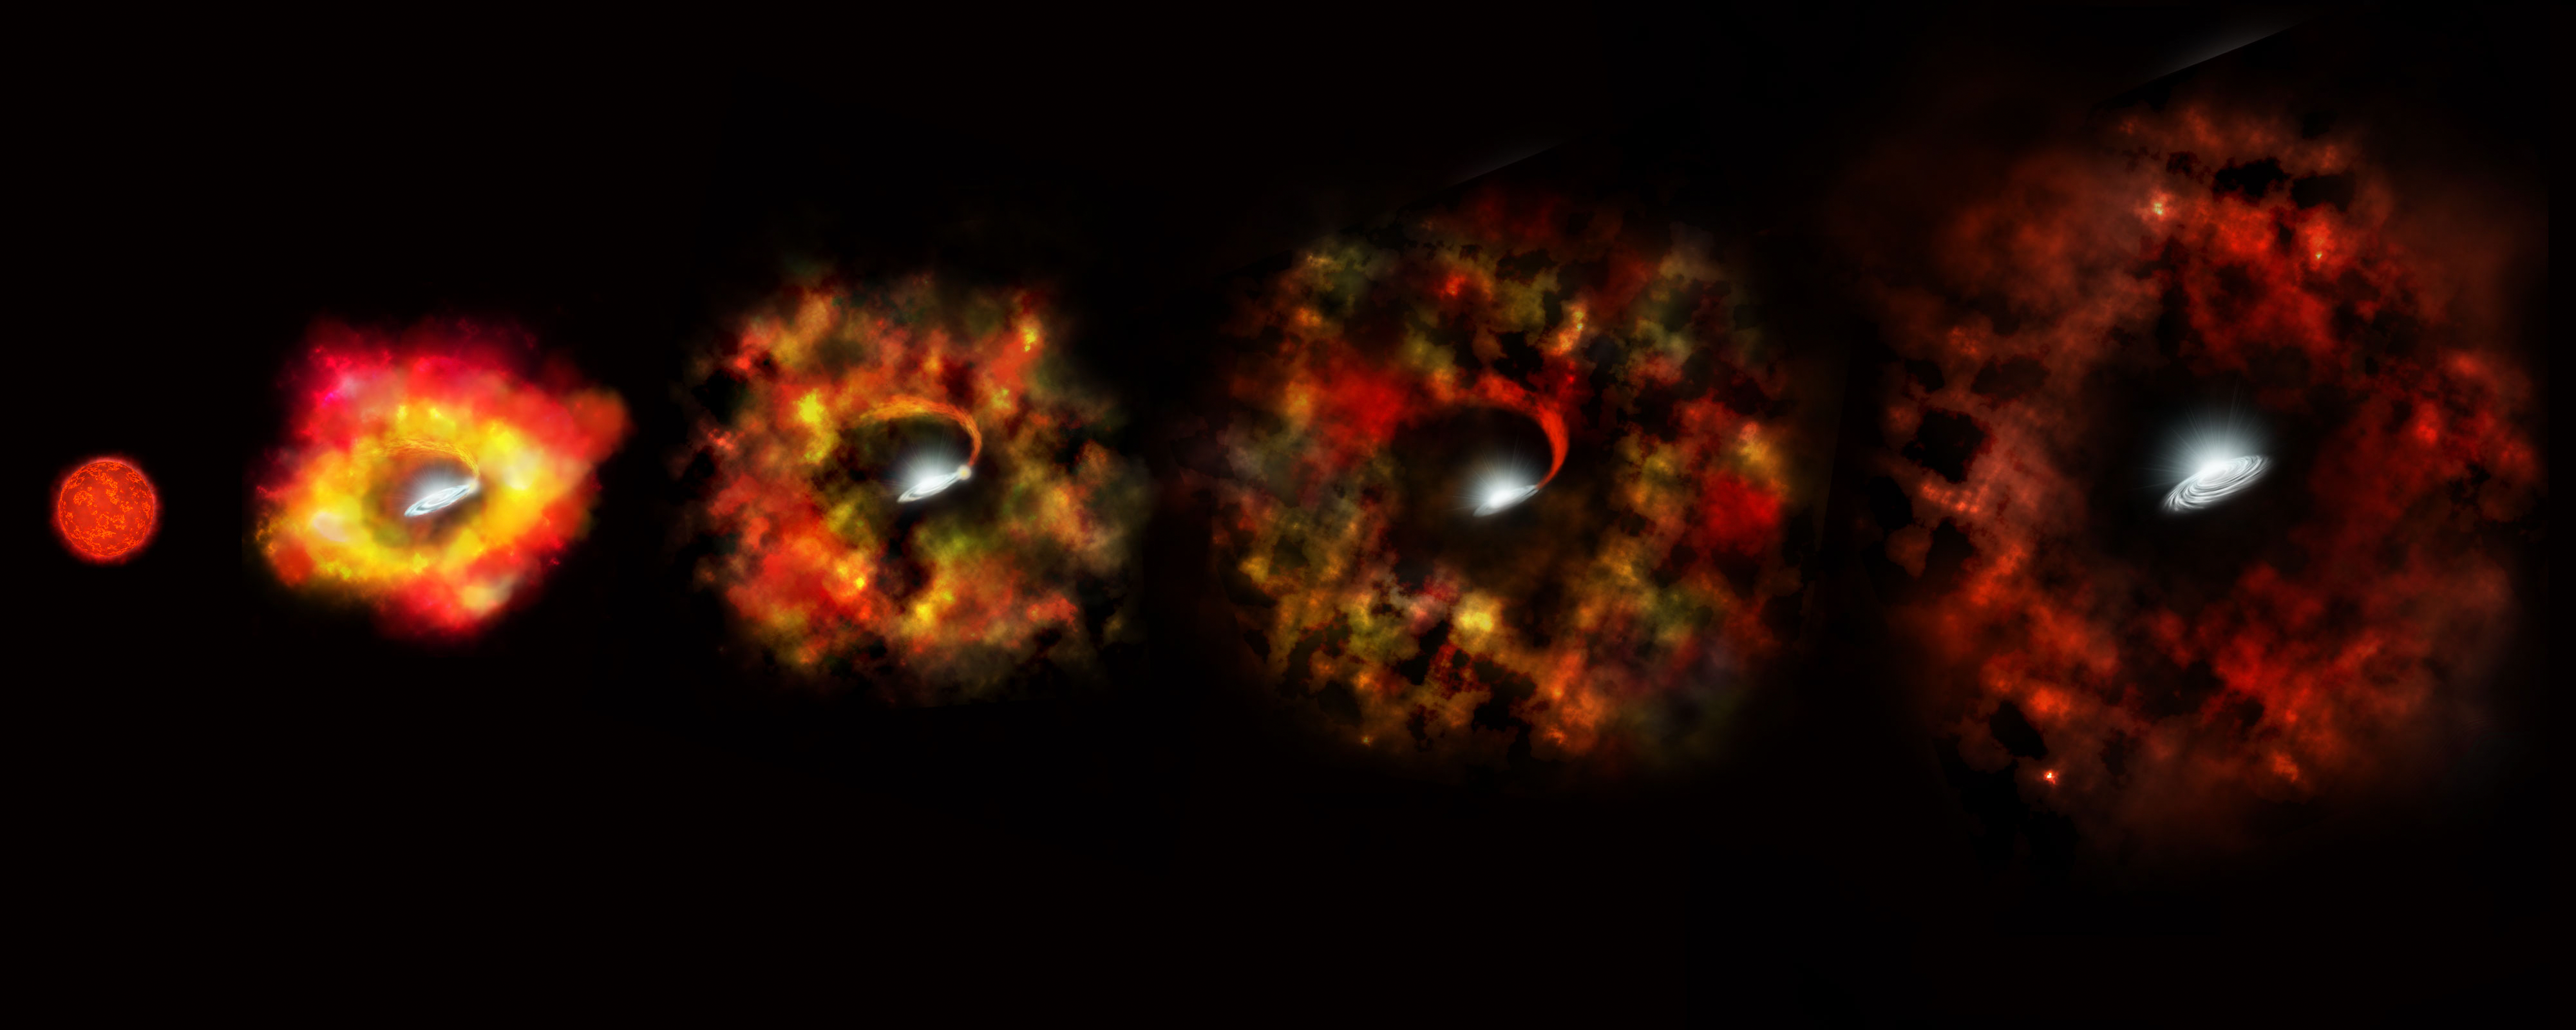

N6946-BH1 failed supernova (artist's impression)

This artist’s impression shows the final stages in the life of a supermassive star that fails to explode as a supernova but instead implodes under gravity to form a black hole. From left to right: the massive star has evolved to a red supergiant, the envelope of the star is ejected and expands, producing a cold, red transient source surrounding the newly formed black hole. Some residual material may fall onto the black hole, as illustrated by the stream and the disc, potentially powering some optical and infrared emissions years after the collapse.

Credit: NASA, ESA, and P. Jeffries (STScI)